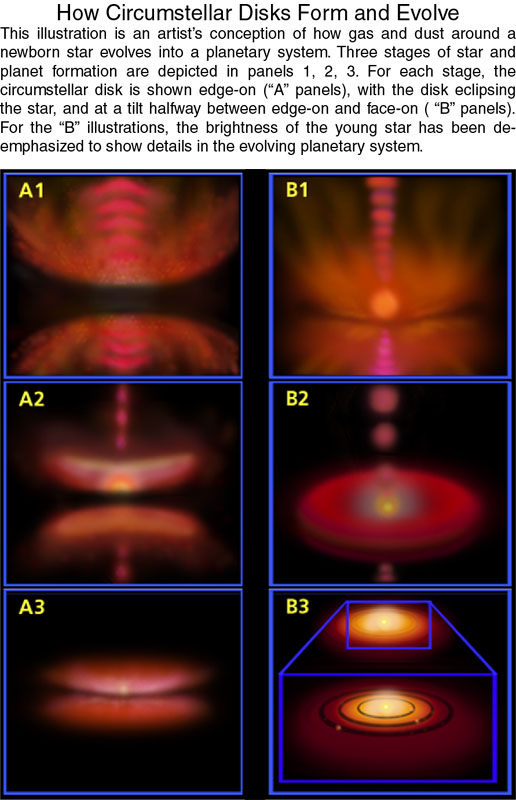

How circumstellar disks form and evolve

The following illustration is an artist's conception of how gas and dust around a newborn star evolves into a planetary system. Three stages of star and planet formation are depicted in panels 1, 2, 3. For each stage, the circumstellar disk is shown edge-on ("A" panels), with the disk eclipsing the star, and at a tilt halfway between edge-on and face-on ("B" panels). For the "B" illustrations, the brightness of the young star has been de-emphasized to show details in the evolving planetary system.

Credit: STScI